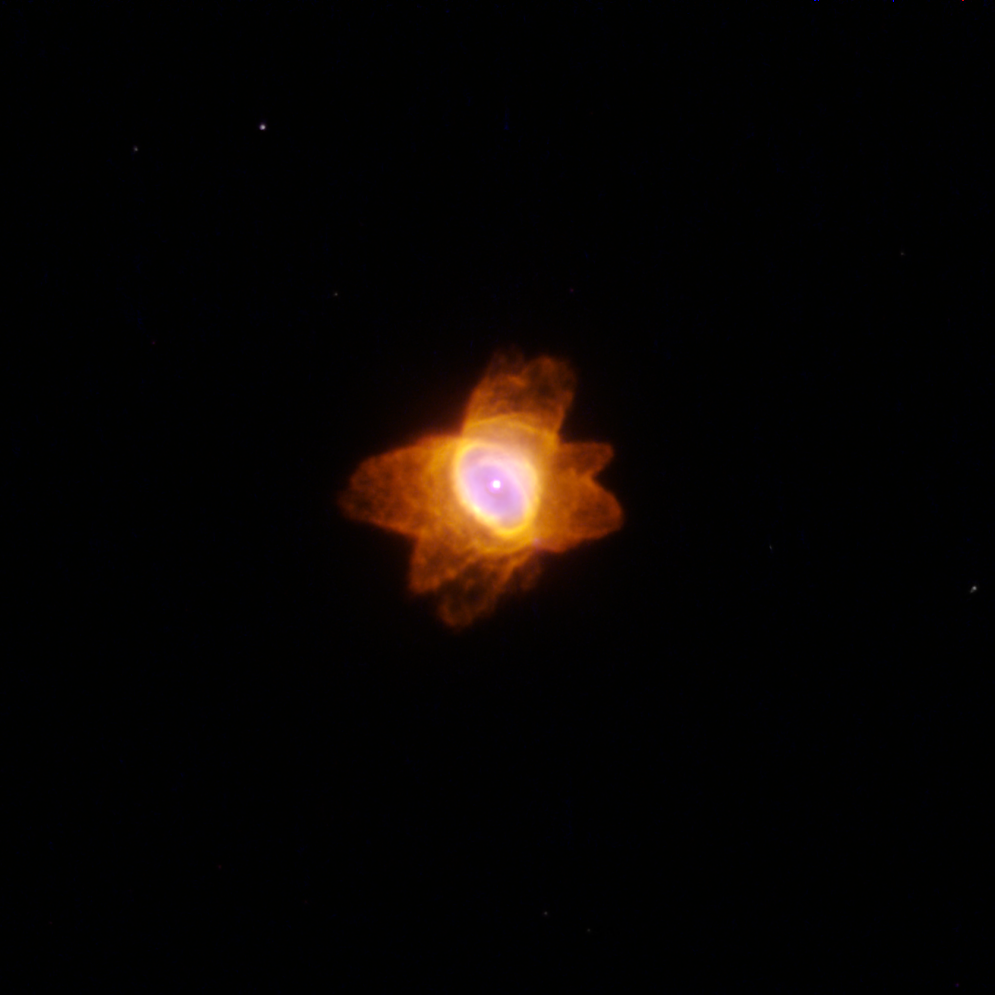

He 2-47

He 2-47

Credit: NASA, ESA, and The Hubble Heritage Team (STScI/AURA)